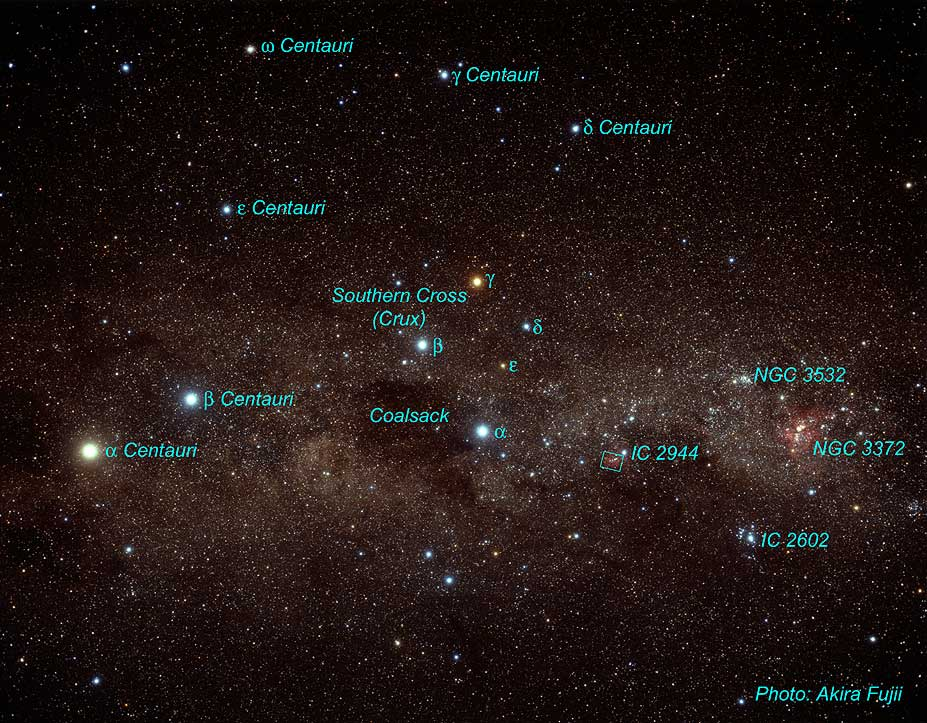

The Southern Cross Constellation

Constellation of the Southern Cross (Crux).

Credit: Akira Fujii